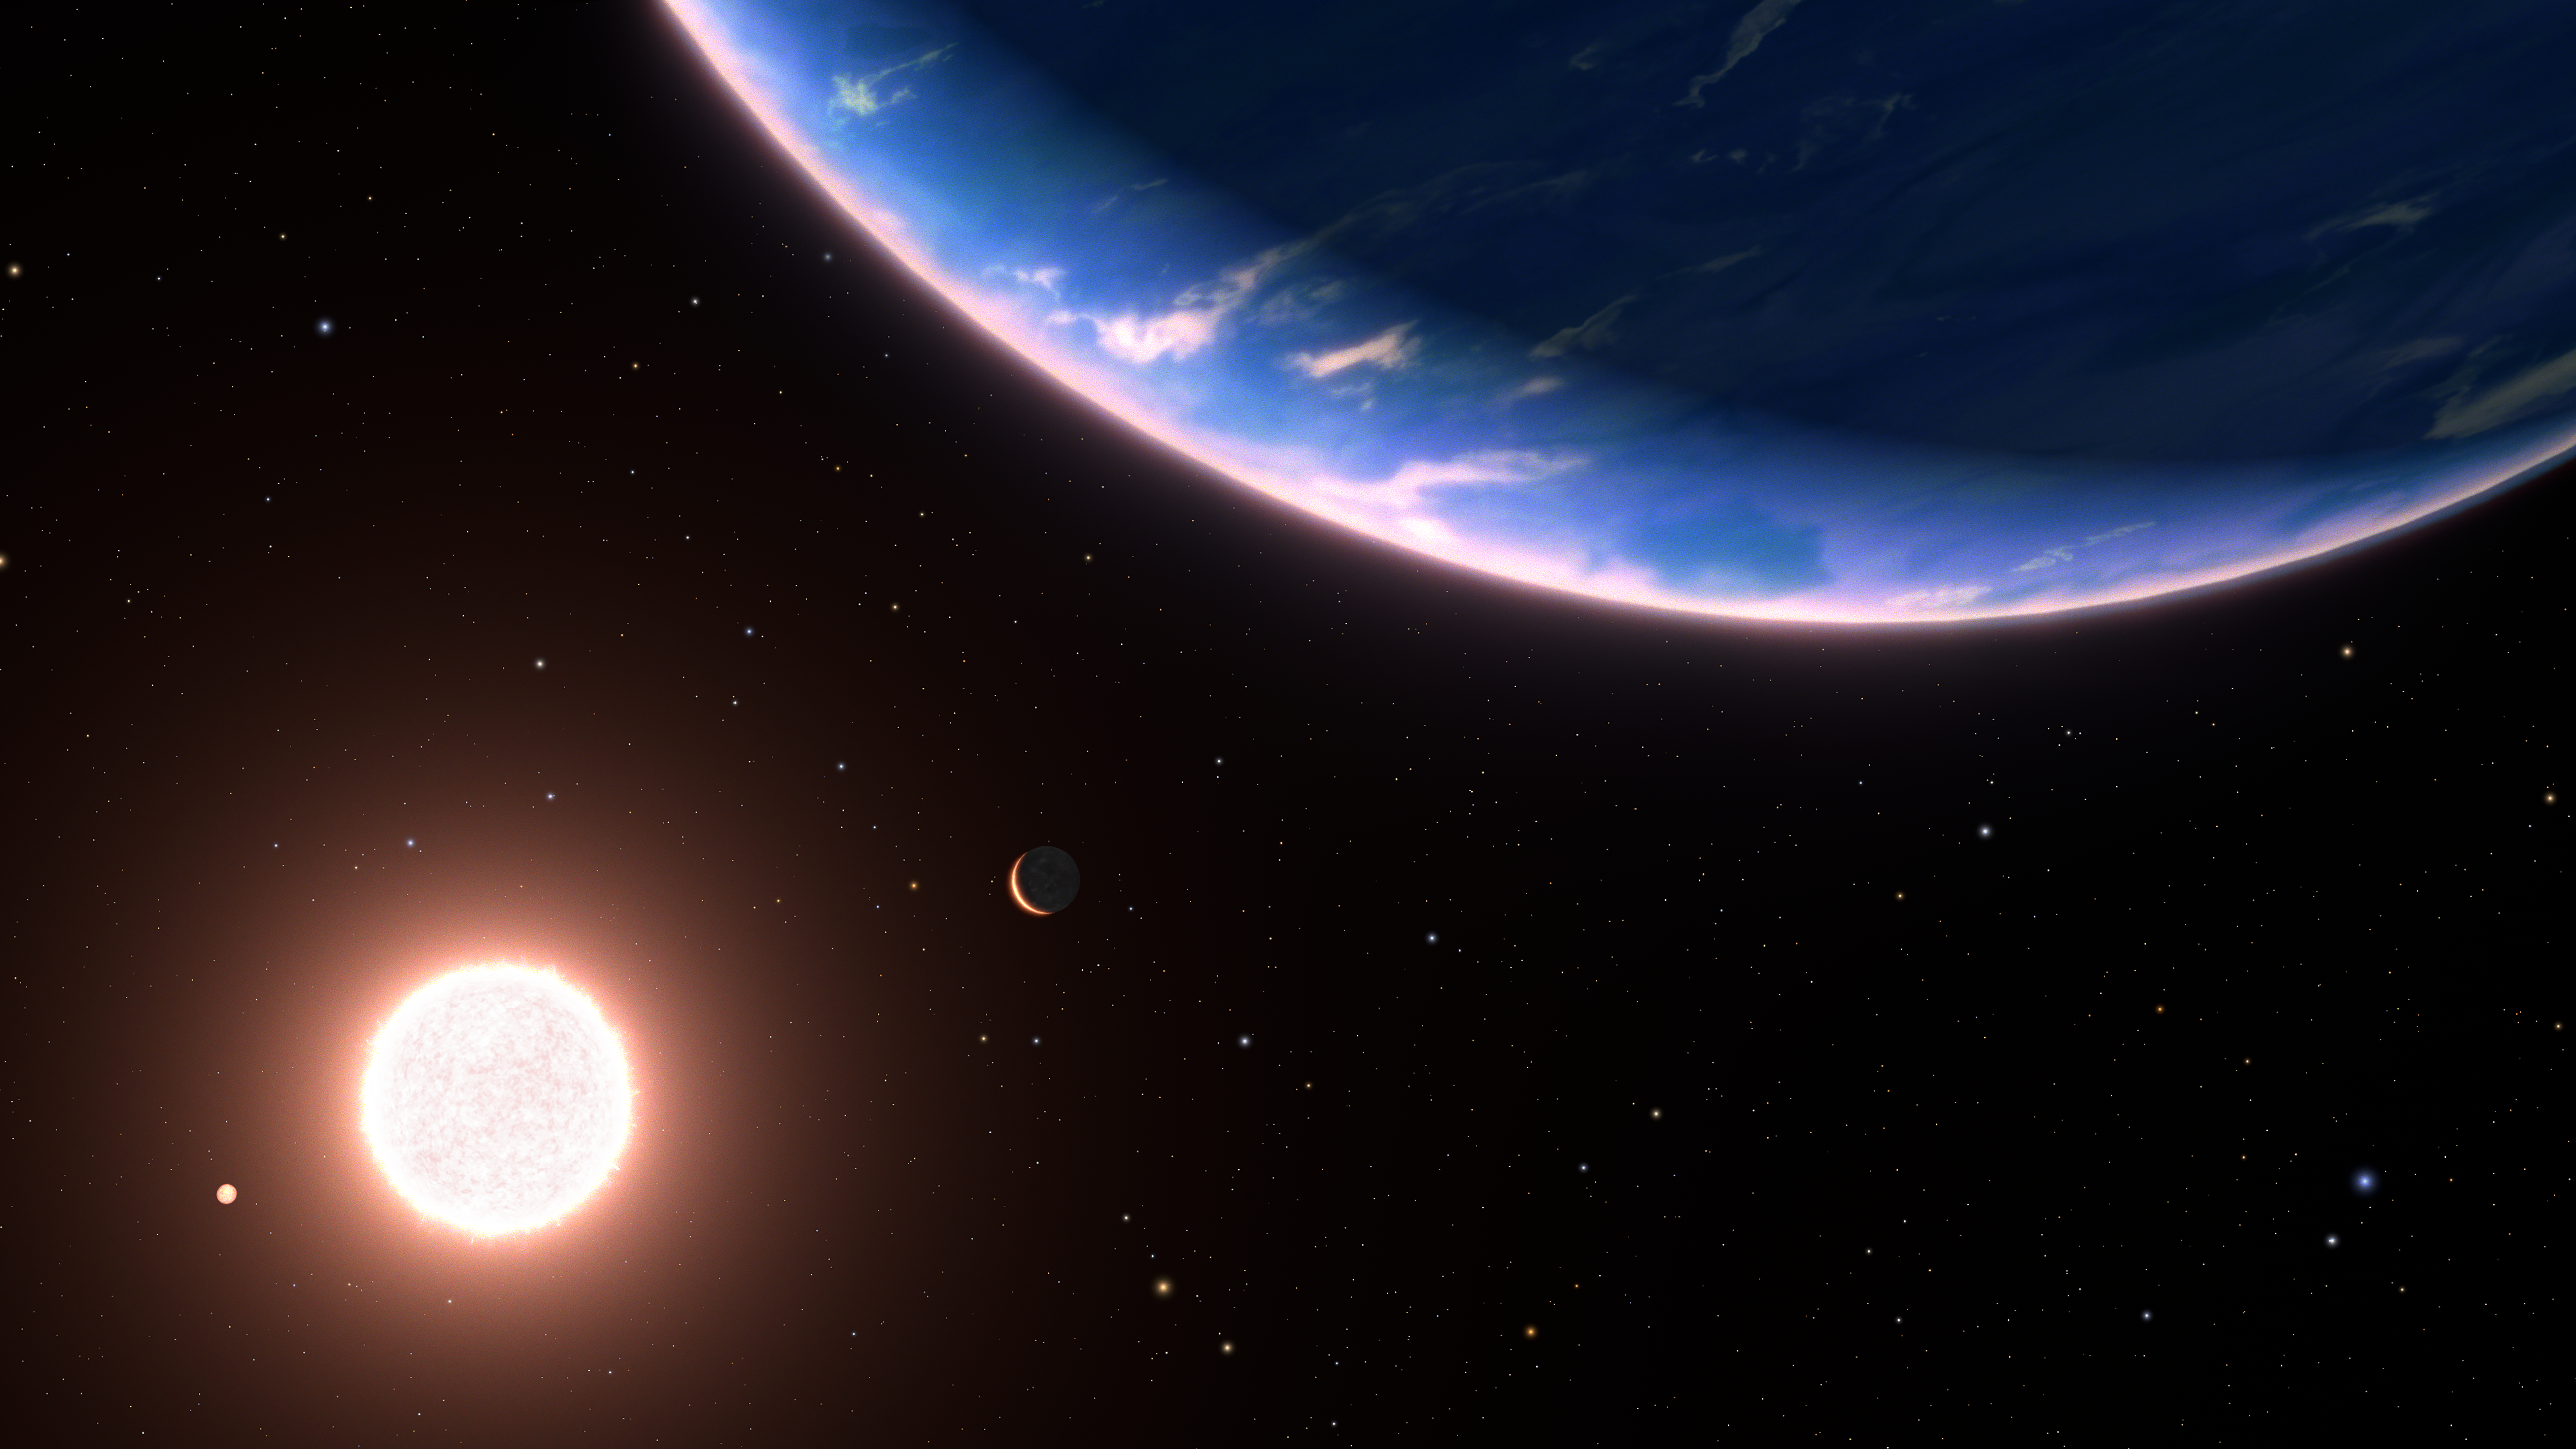

Exoplanet GJ 9827d (artist’s concept)

This is an artist’s conception of the exoplanet GJ 9827d, the smallest exoplanet where water vapour has been detected in its atmosphere. The planet could be an example of potential planets with water-rich atmospheres elsewhere in our galaxy. It is a rocky world, only about twice Earth’s diameter. It orbits the red dwarf star GJ 9827. Two inner planets in the system are on the left. The background stars are plotted as they would be seen to the unaided eye looking back toward our Sun, which itself is too faint to be seen. The blue star at upper right is Regulus, the yellow star at bottom centre is Denebola, and the blue star at bottom right is Spica. The constellation Leo is on the left, and Virgo is on the right. Both constellations are distorted from our Earth-bound view from 97 light-years away.

Credit: NASA, ESA, Leah Hustak and Ralf Crawford (STScI)